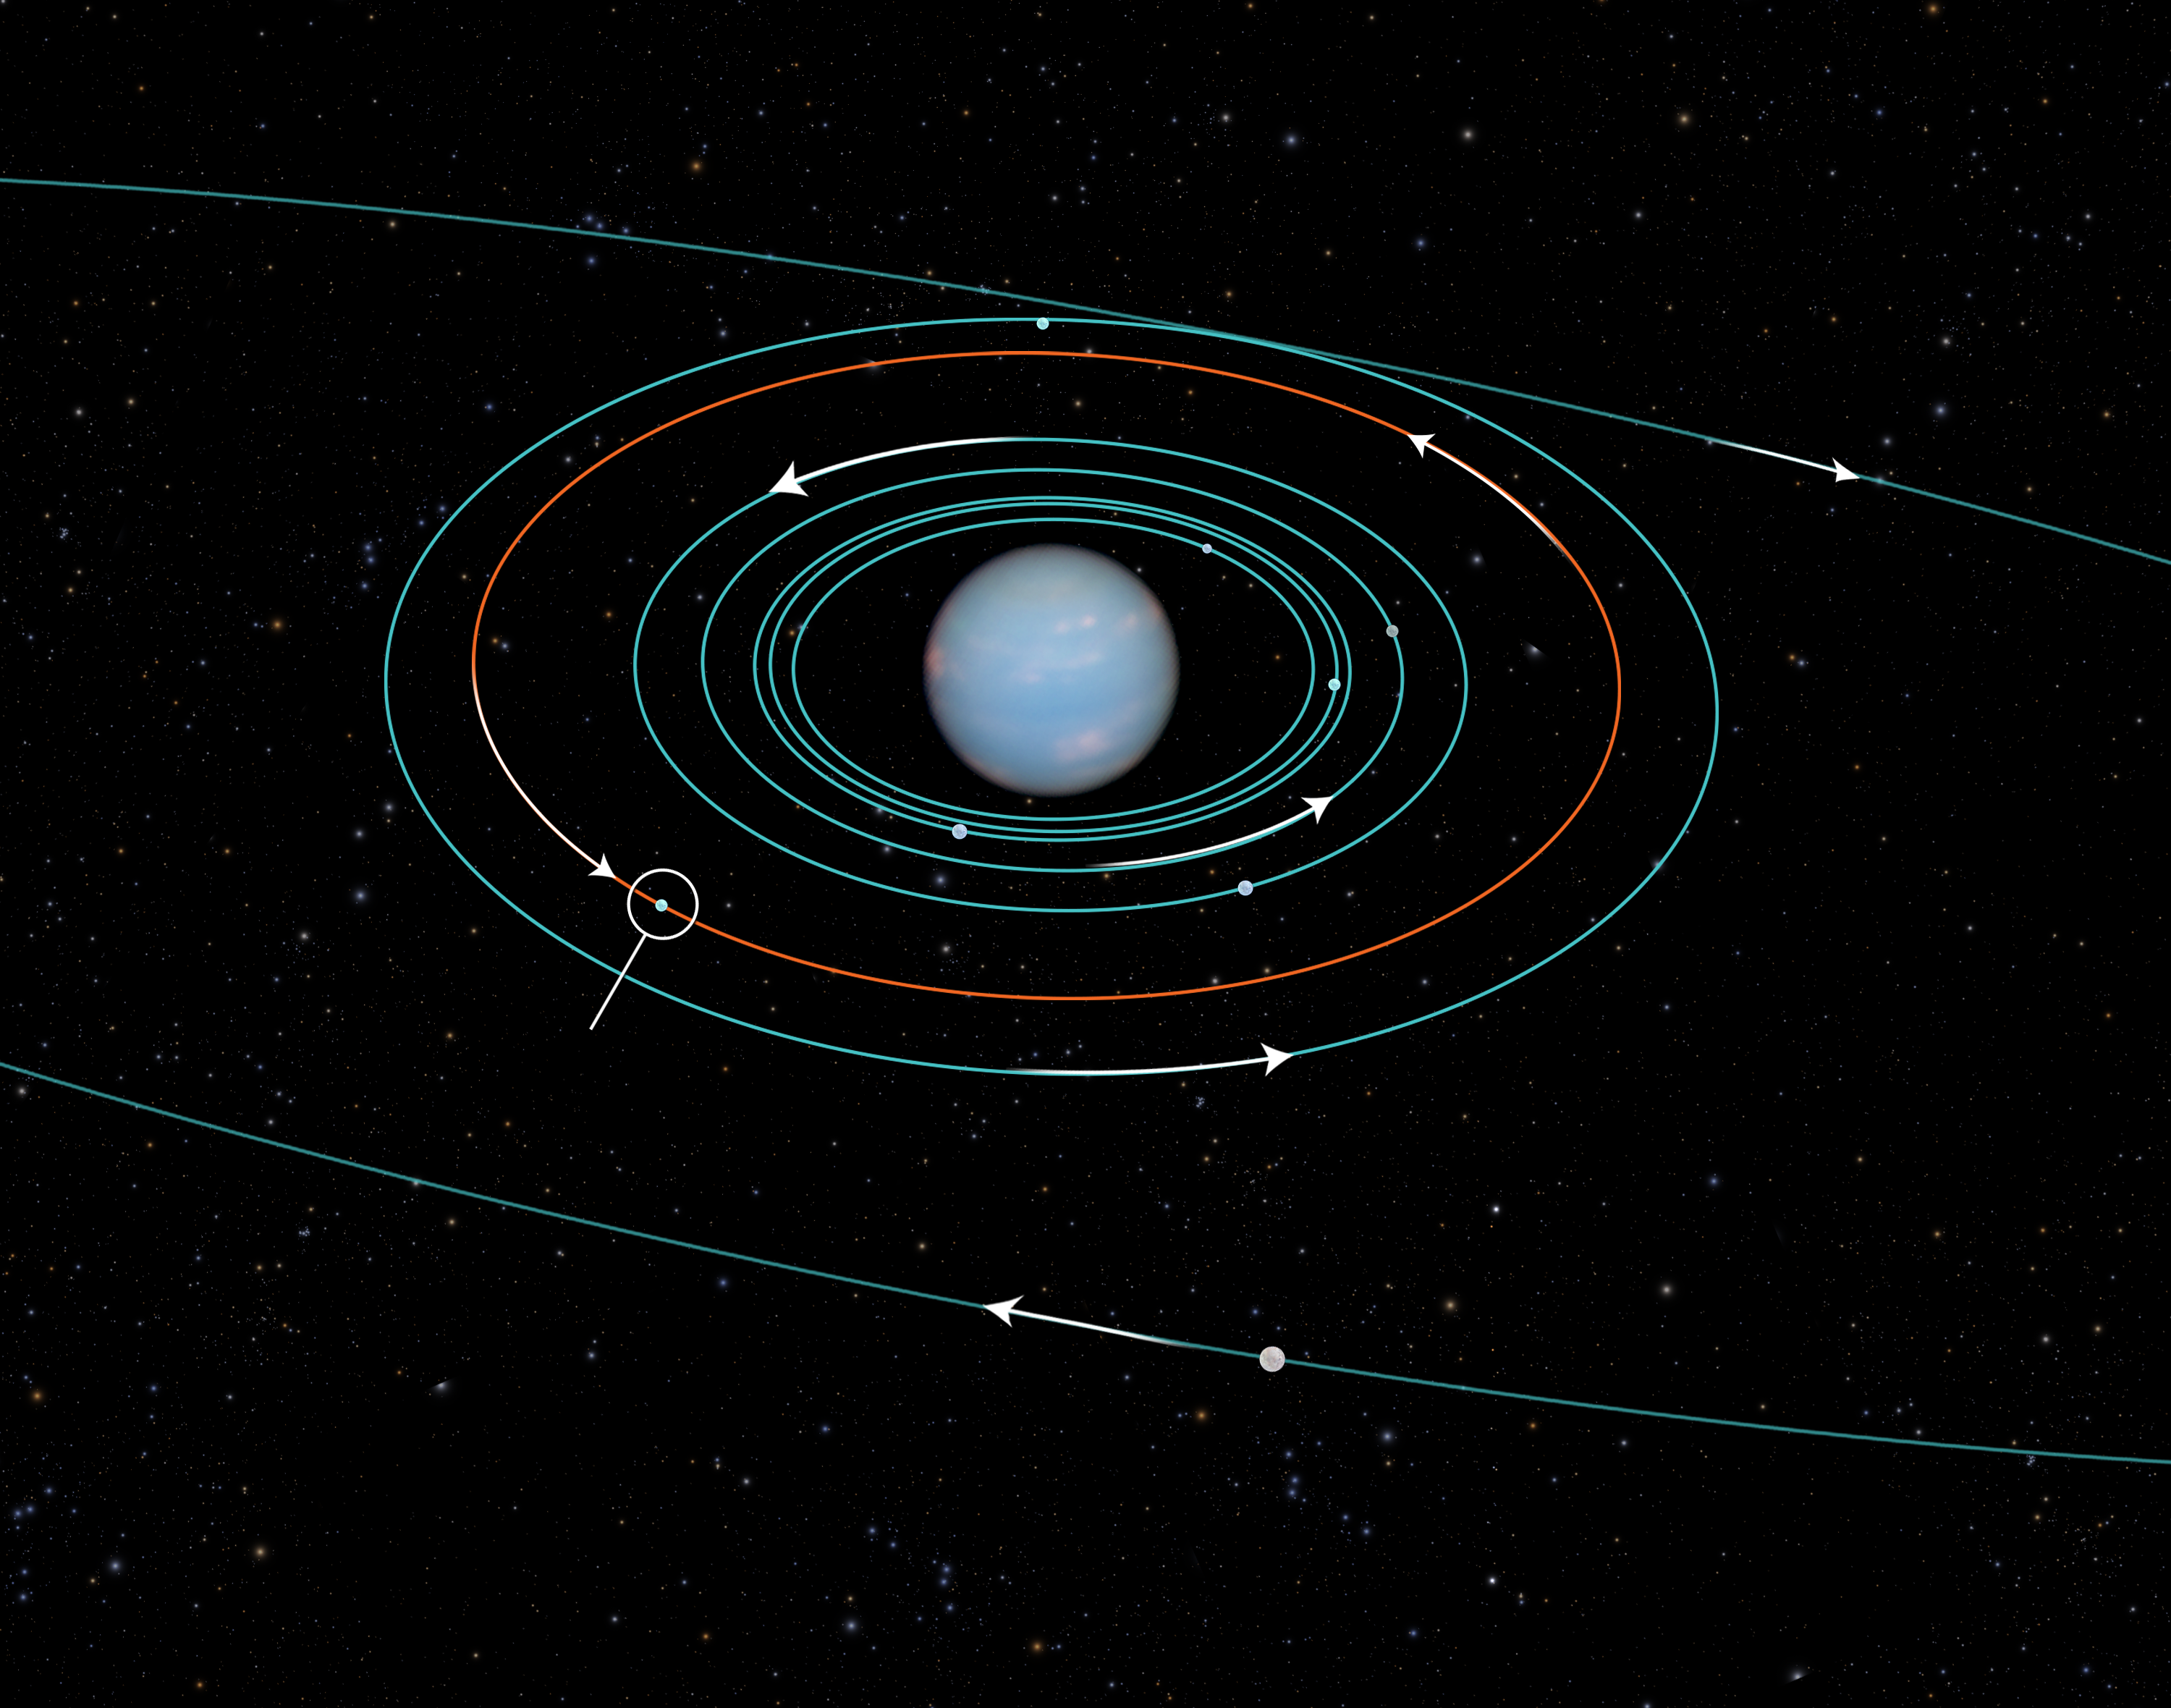

Orbit of Neptune’s newly-discovered moon

This diagram shows the orbits of several moons located close to the planet Neptune. All of them were discovered in 1989 by NASA's Voyager 2 spacecraft, with the exception of S/2004 N 1, which was discovered in archival Hubble Space Telescope images taken from 2004 to 2009. The moons all follow prograde orbits and are nestled among Neptune's rings (not shown).

The outer moon Triton was discovered in 1846 — the same year the planet itself was discovered. Triton's orbit is retrograde, suggesting it is a captured Kuiper Belt object and therefore a distant cousin of Pluto. The inner moons may have formed after Triton's capture several billion years ago.

Credit: NASA, ESA, and A. Feild (STScI)